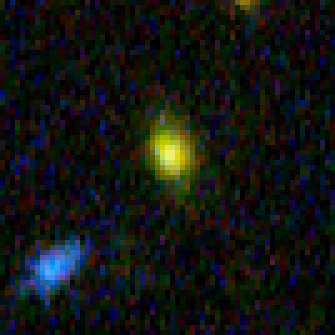

Hubble Building Blocks Galaxy at Redshift 4.00

Building block galaxy at redshift of 4.00 from Hubble Ultra Deep Field image.

Credit: NASA, ESA, and N. Pirzkal (European Space Agency/STScI)